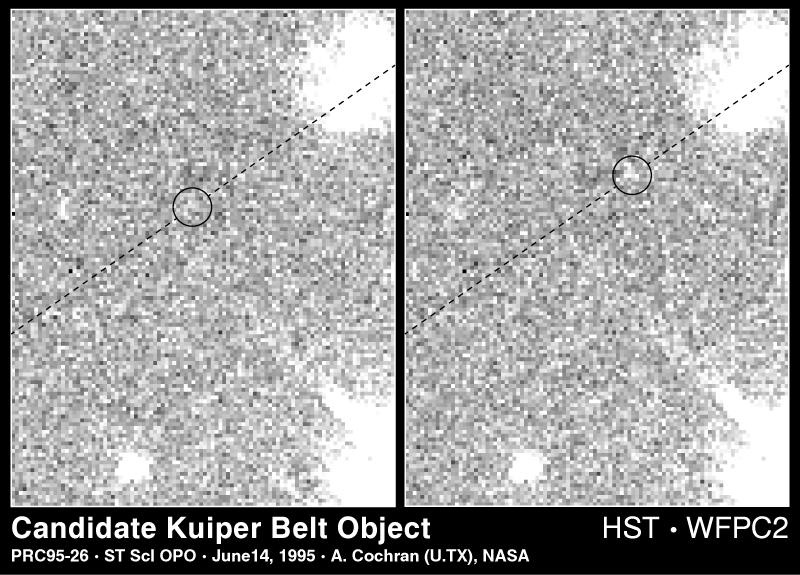

Candidate Kuiper Belt Object

This is sample data from the Hubble Space Telescope that illustrates the detection of comets in the Kuiper Belt, a region of space beyond the orbit of the planet Neptune.

Credit: A. Cochran (University of Texas) and NASA/ESA